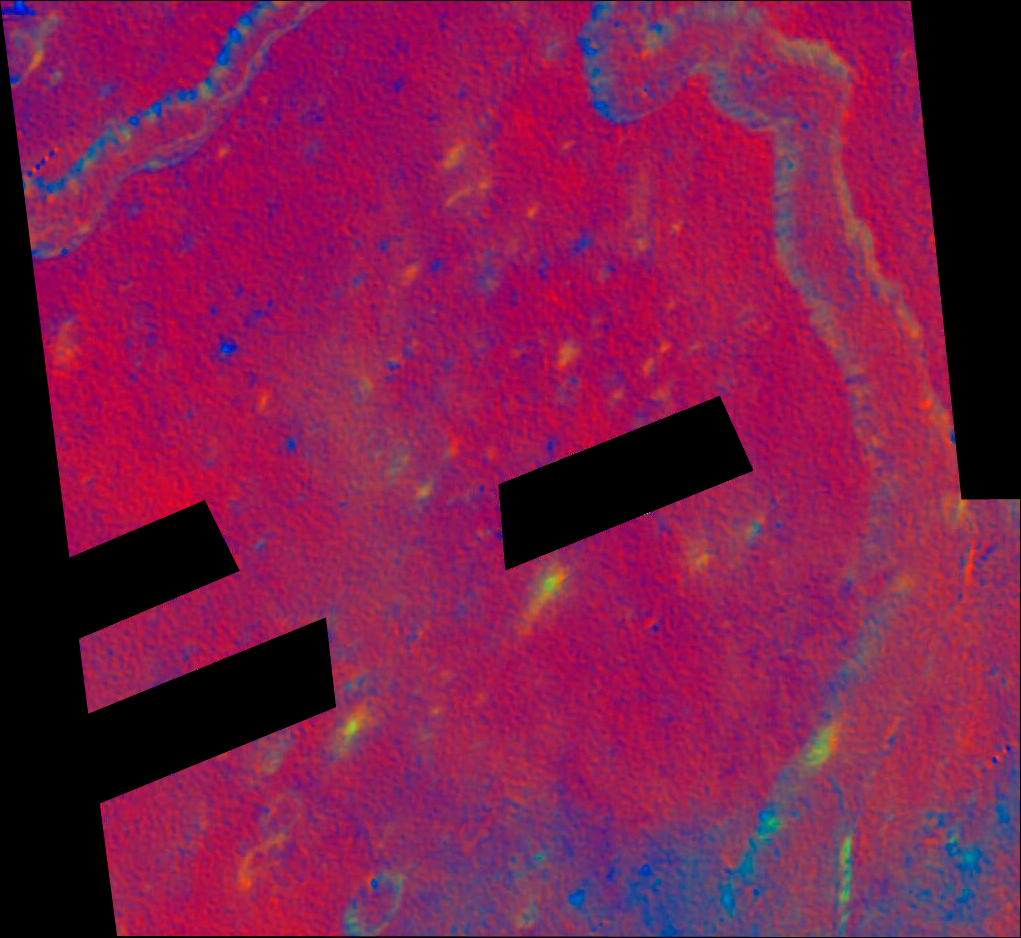

Schroter's valley Rille in false color

This color-composite focuses on a section of Schroter's Valley (rille) and employs ultraviolet- to visible-color-ratio information to accentuate differences that are potentially diagnostic of ilmenite- (i.e, titanium oxide) bearing materials as well as pyroclastic glasses. Bluer units in these images suggest enrichment in opaque phases in a relative sense.

Credit: NASA, ESA, and J. Garvin (NASA/GSFC)